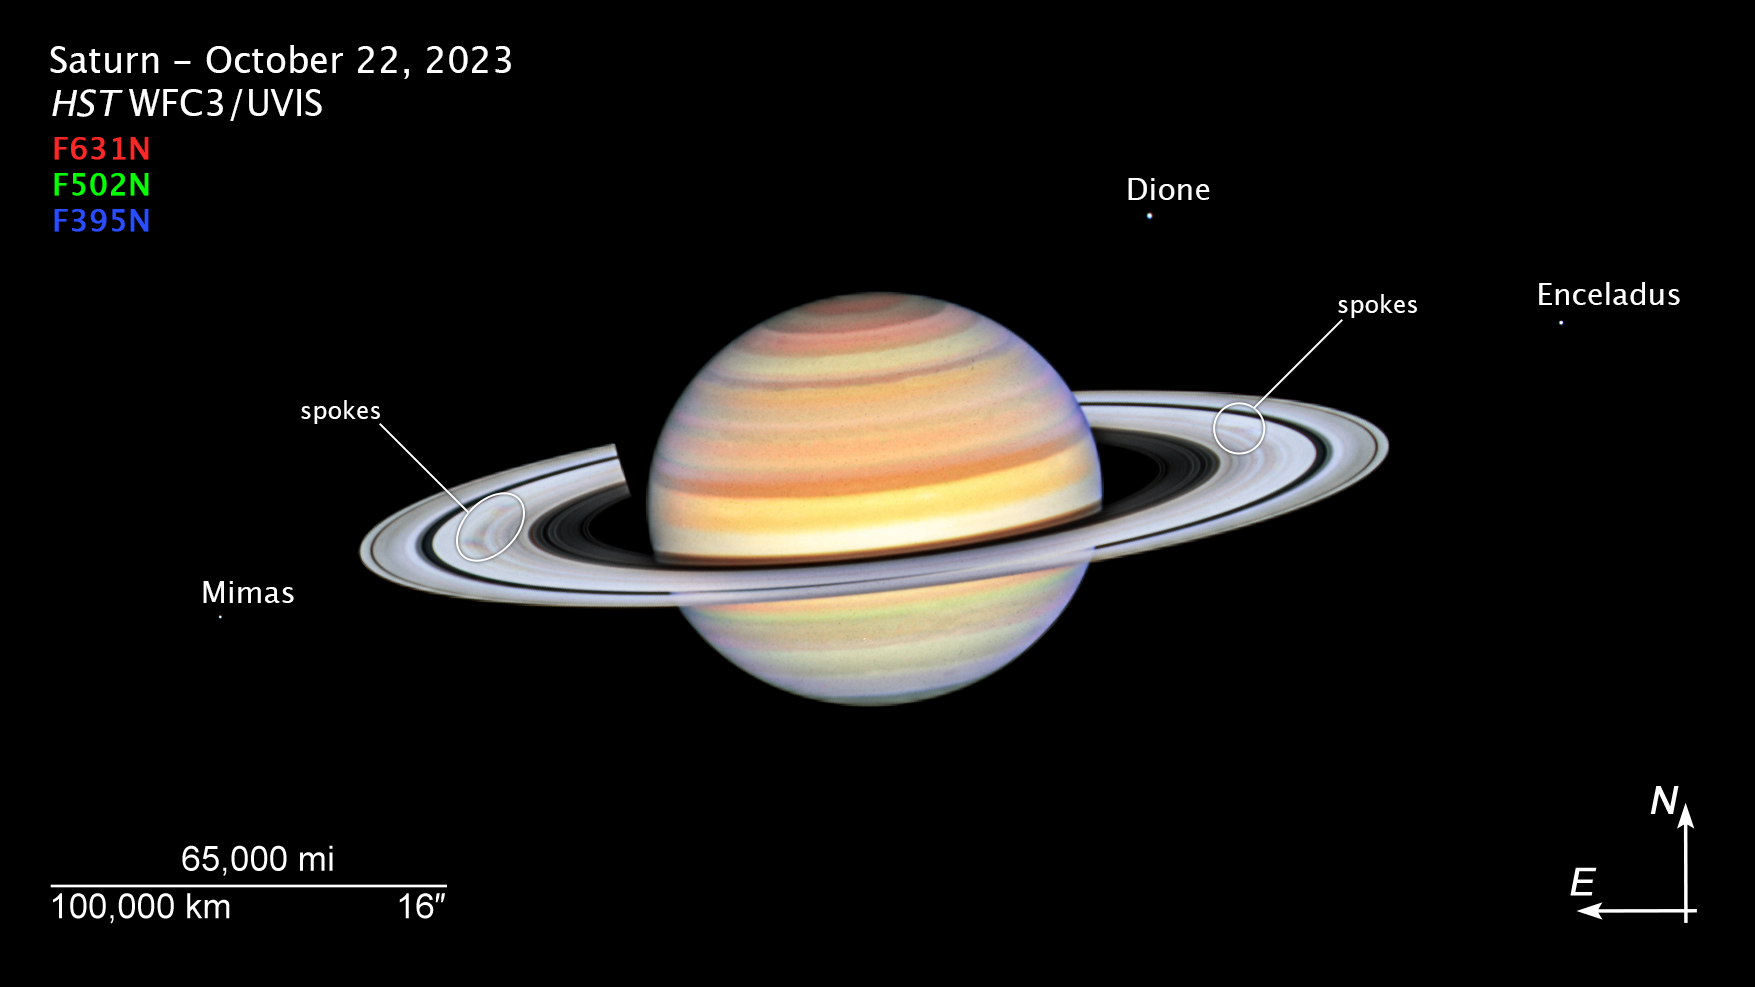

Saturn (October 2023, annotated)

This photo of Saturn was taken by the NASA/ESA Hubble Space Telescope on 22 October 2023, when the ringed planet was approximately 1365 million kilometres from Earth. Hubble's ultra-sharp vision reveals a phenomenon called ring spokes.

Saturn's spokes are transient features that rotate along with the rings. Their ghostly appearance only persists for two or three rotations around Saturn. During active periods, freshly-formed spokes continuously add to the pattern.

In 1981, NASA's Voyager 2 first photographed the ring spokes. Hubble continues observing Saturn annually as the spokes come and go. This cycle has been captured by Hubble's Outer Planets Atmospheres Legacy (OPAL) program that began nearly a decade ago to annually monitor weather changes on all four gas-giant outer planets.

Hubble's crisp images show that the frequency of spoke apparitions is seasonally driven, first appearing in OPAL data in 2021 but only on the morning (left) side of the rings. Long-term monitoring shows that both the number and contrast of the spokes vary with Saturn's seasons. Saturn is tilted on its axis like Earth and has seasons lasting approximately seven years.

This year, these ephemeral structures appear on both sides of the planet simultaneously as they spin around the giant world. Although they look small compared with Saturn, their length and width can stretch longer than Earth's diameter!

The OPAL team notes that the leading theory is that spokes are tied to interactions between Saturn's powerful magnetic field and the sun. Planetary scientists think that electrostatic forces generated from this interaction levitate dust or ice above the ring to form the spokes, though after several decades no theory perfectly predicts the spokes. Continued Hubble observations may eventually help solve the mystery.

Credit: NASA, ESA, STScI, A. Simon (NASA-GSFC)